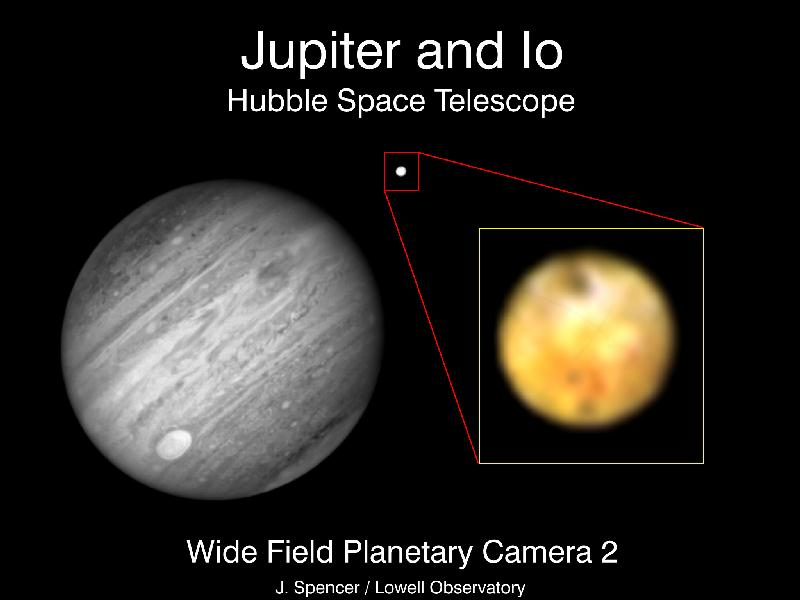

Jupiter and Io

This picture is a composite of a black and white near infrared image of Jupiter and its satellite Io and a colour image of Io at shorter wavelengths taken at almost the same time on March 5, 1994. These are the first images of a giant planet or its satellites taken by the Hubble Space Telescope (HST) since the repair mission in December 1993.

Credit: John Spencer, Lowell Observatory; NASA/ESA